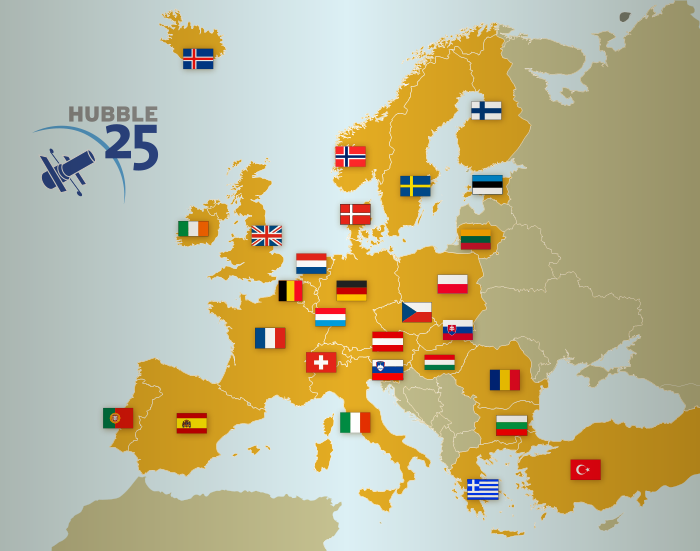

A map of the countries hosting Hubble 25th anniversary unveiling events

The countries with informal education venues that will host events in celebration of Hubble’s 25th year in orbit, including the unveiling of a large and high-quality print of the 25th anniversary image provided by ESA/Hubble, are shown in yellow on this map.

These countries are: Austria, Belgium, Bulgaria, Czech Republic, Denmark, Estonia, Finland, France, Germany, Greece, Hungary, Iceland, Ireland, Italy, Lithuania, Luxembourg, the Netherlands, Norway, Poland, Portugal, Romania, Slovenia, Spain, Sweden, Switzerland, Slovakia, Turkey and the United Kingdom.

Credit: ESA/Hubble